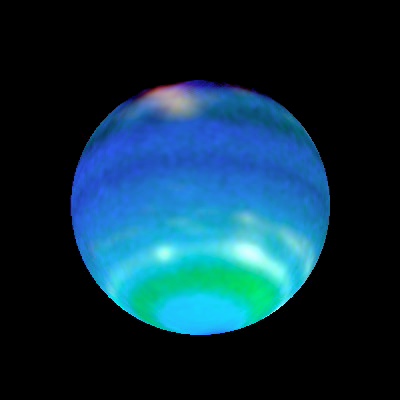

Opposite Hemispheres of Neptune

These views of Neptune, as seen through the Hubble Space Telescope, are helping planetary scientists gain some insight into the weird and wild weather that is a hallmark of the eighth planet from the sun. On Neptune, winds blow at 900 miles per hour (about 1450 kilometres per hour) and huge storms -- some the size of Earth itself -- come and go with regularity. How, precisely, Neptune's weather is driven is a mystery since the sun, which drives the Earth's weather, is 900 times dimmer there than on Earth. The bottom images show Neptune's Hubble portrait circa 1996. The top images were taken this year and help illustrate the dynamic weather features that dominate the planet.

Credit: Lawrence A. Sromovsky (University of Wisconsin-Madison) and NASA/ESA